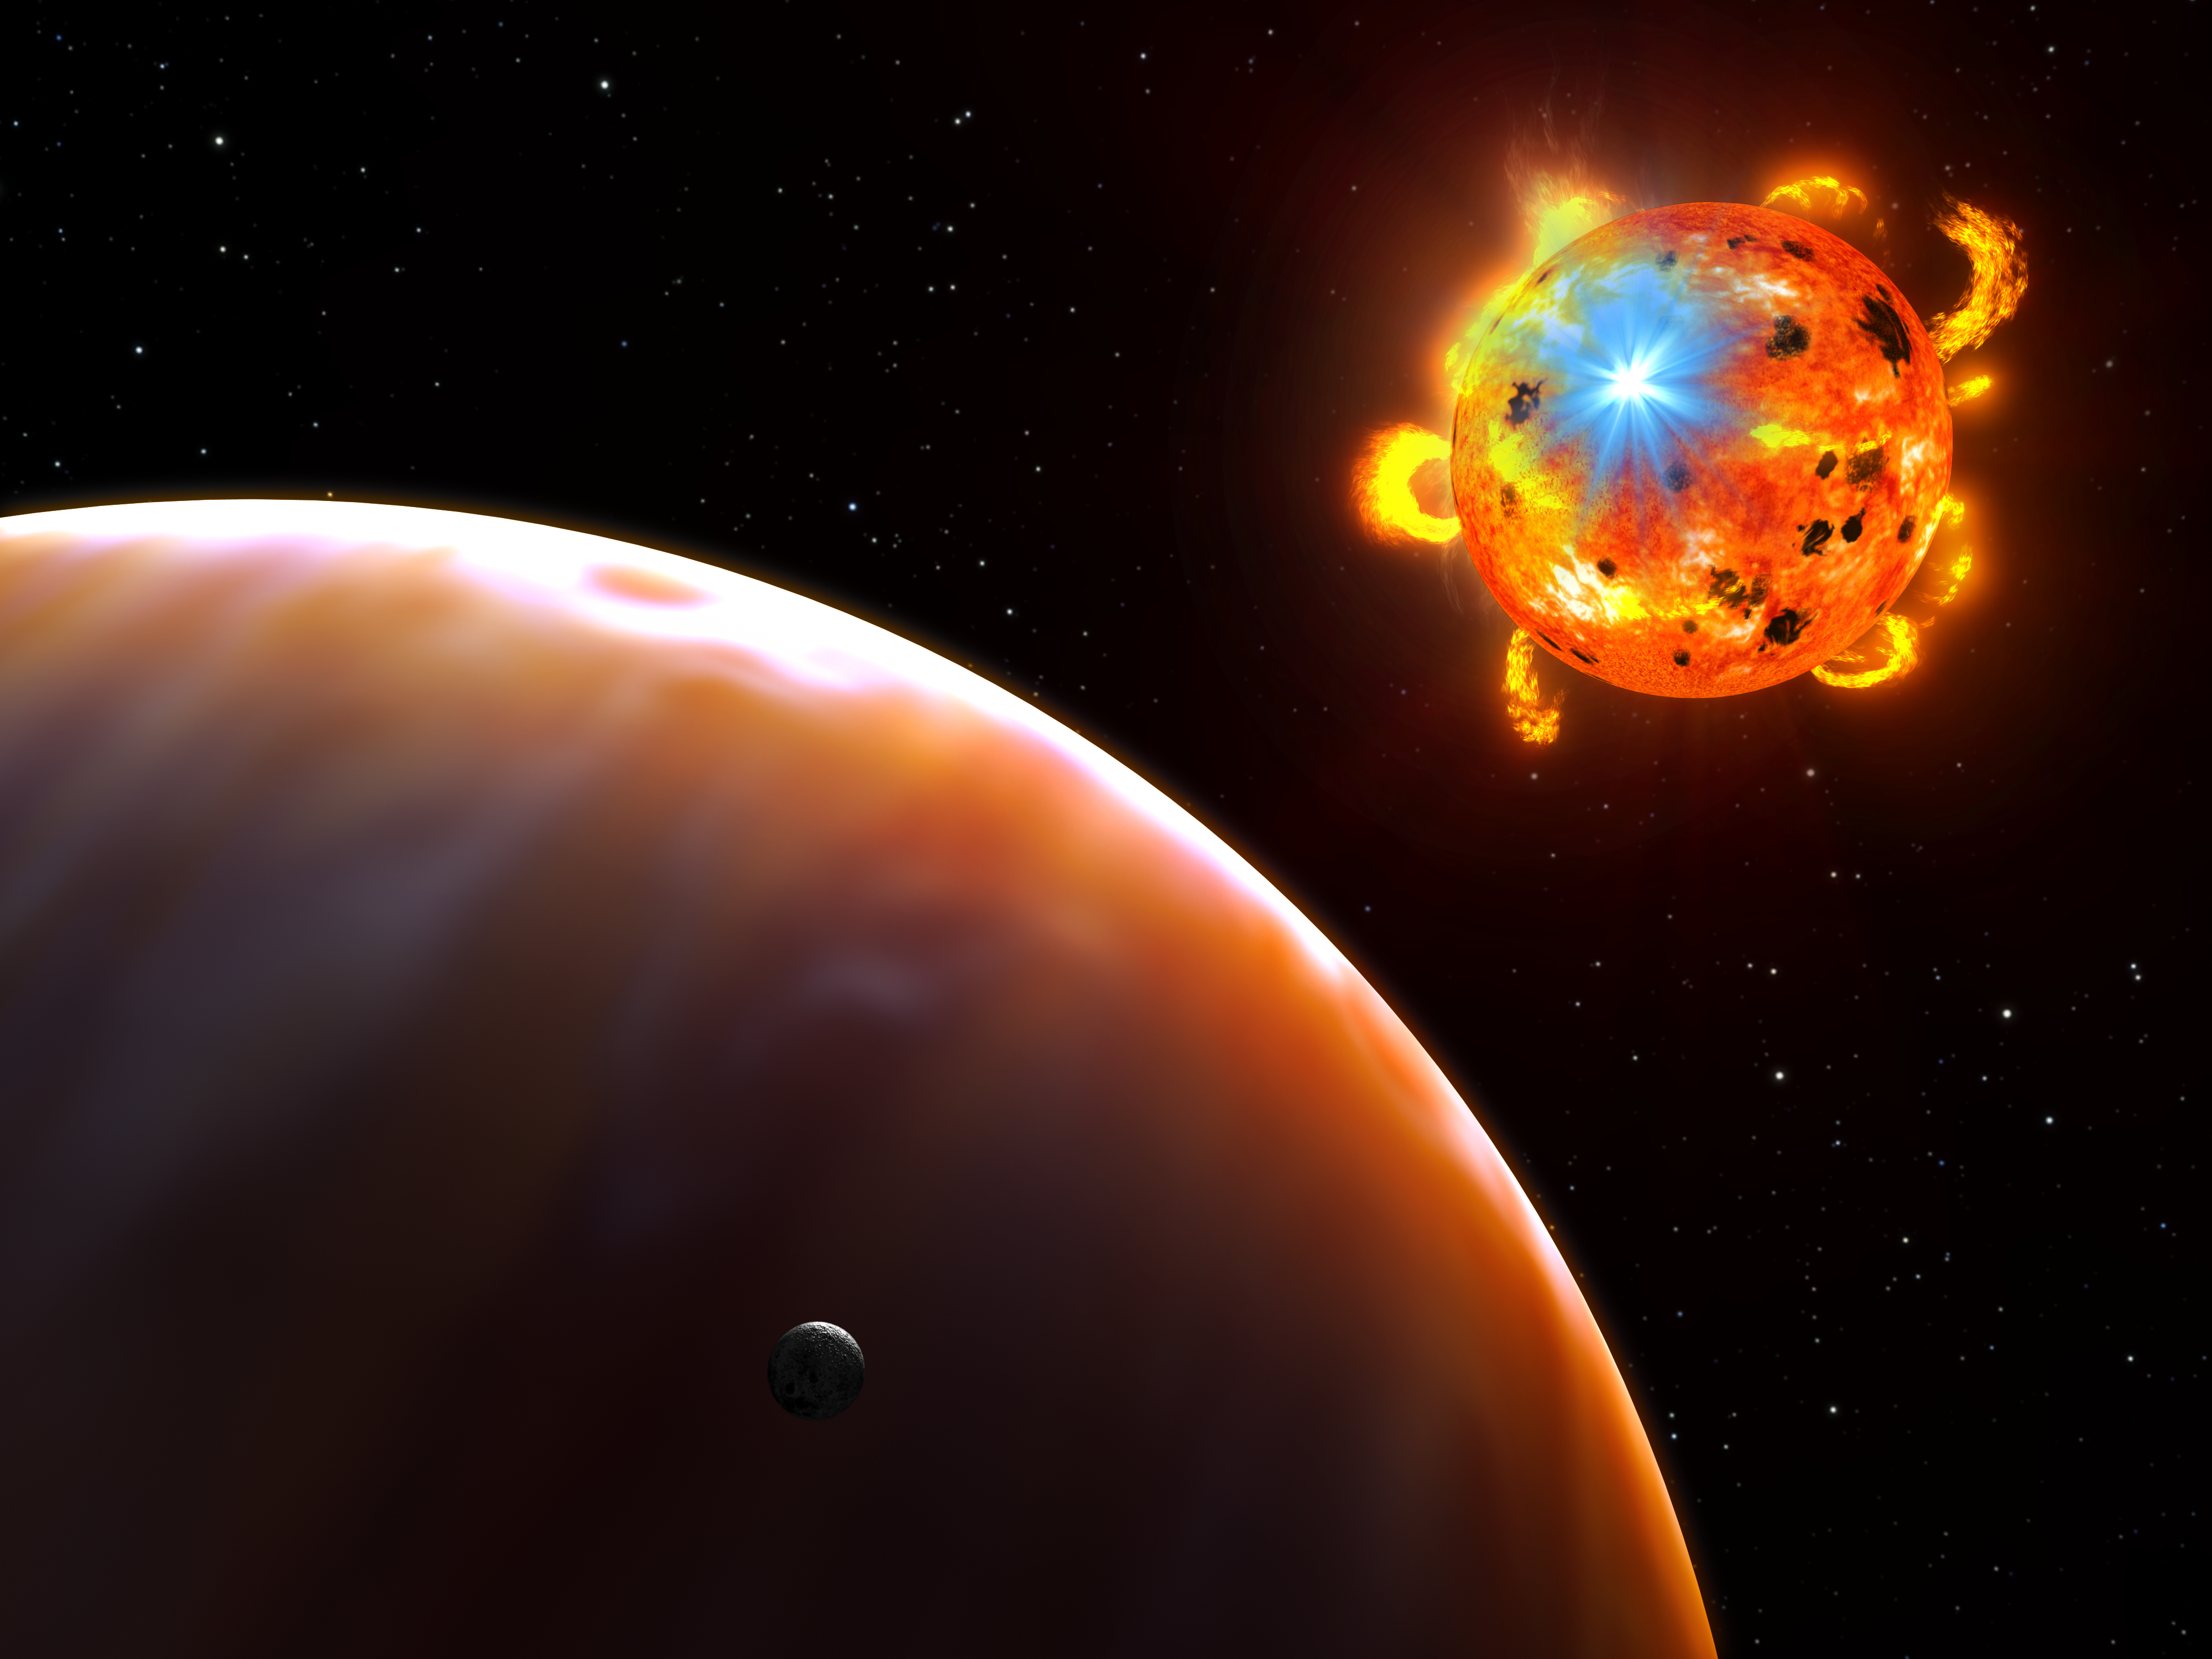

Flaring red dwarf star (artist's impression)

This is an artist's concept of a red dwarf star undergoing a powerful eruption, called a stellar flare. A hypothetical planet is in the foreground.

Flares are sudden eruptions of heated plasma that occur when the field lines of powerful magnetic fields in a star's atmosphere "reconnect," snapping like a rubber band and releasing vast amounts of energy equivalent to the power of 100 million atomic bombs exploding simultaneously.

Studying the light from 215,000 older red dwarfs collected in observations by the NASA/ESA Hubble Space Telescope, astronomers found 100 stellar flares popping off over the course of a week.

Credit: NASA, ESA, and G. Bacon (STScI). Science Credit: NASA, ESA, A. Kowalski (University of Washington, USA), R. Osten and K. Sahu (STScI) and S. Hawley (University of Washington, USA)